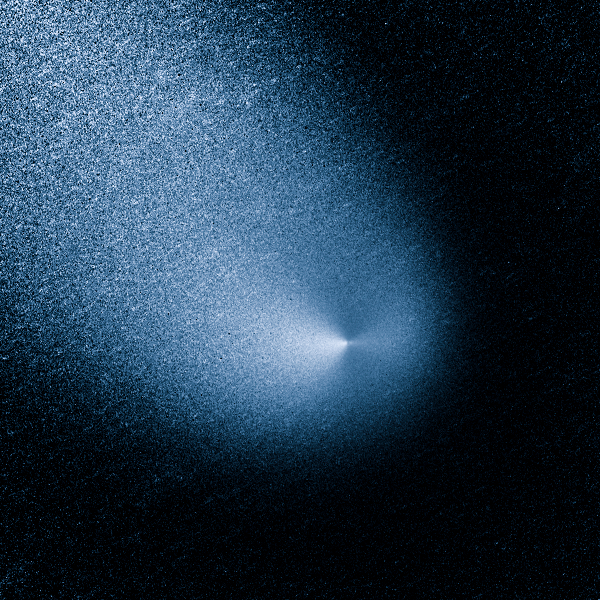

Comet Siding Spring

This is a processed close up image of Comet Siding Spring.

Comet Siding Spring is plunging toward the Sun along a roughly 1-million-year orbit. The comet, discovered in 2013, was within the radius of Jupiter's orbit when the Hubble Space Telescope photographed it on March 11, 2014.

Hubble resolves two jets of dust coming from the solid icy nucleus. These persistent jets were first seen in Hubble pictures taken on Oct. 29, 2013. The feature should allow astronomers to measure the direction of the nucleus's pole, and hence, rotation axis.

The comet will make its closest approach to our Sun on Oct. 25, 2014, at a distance of 130 million miles, well outside Earth's orbit. On its inbound leg, Comet Siding Spring will pass within 84,000 miles of Mars on Oct. 19, 2014, which is less than half the Moon's distance from Earth. The comet is not expected to become bright enough to be seen by the naked eye.

Credit: NASA, ESA, and J.-Y. Li (Planetary Science Institute)